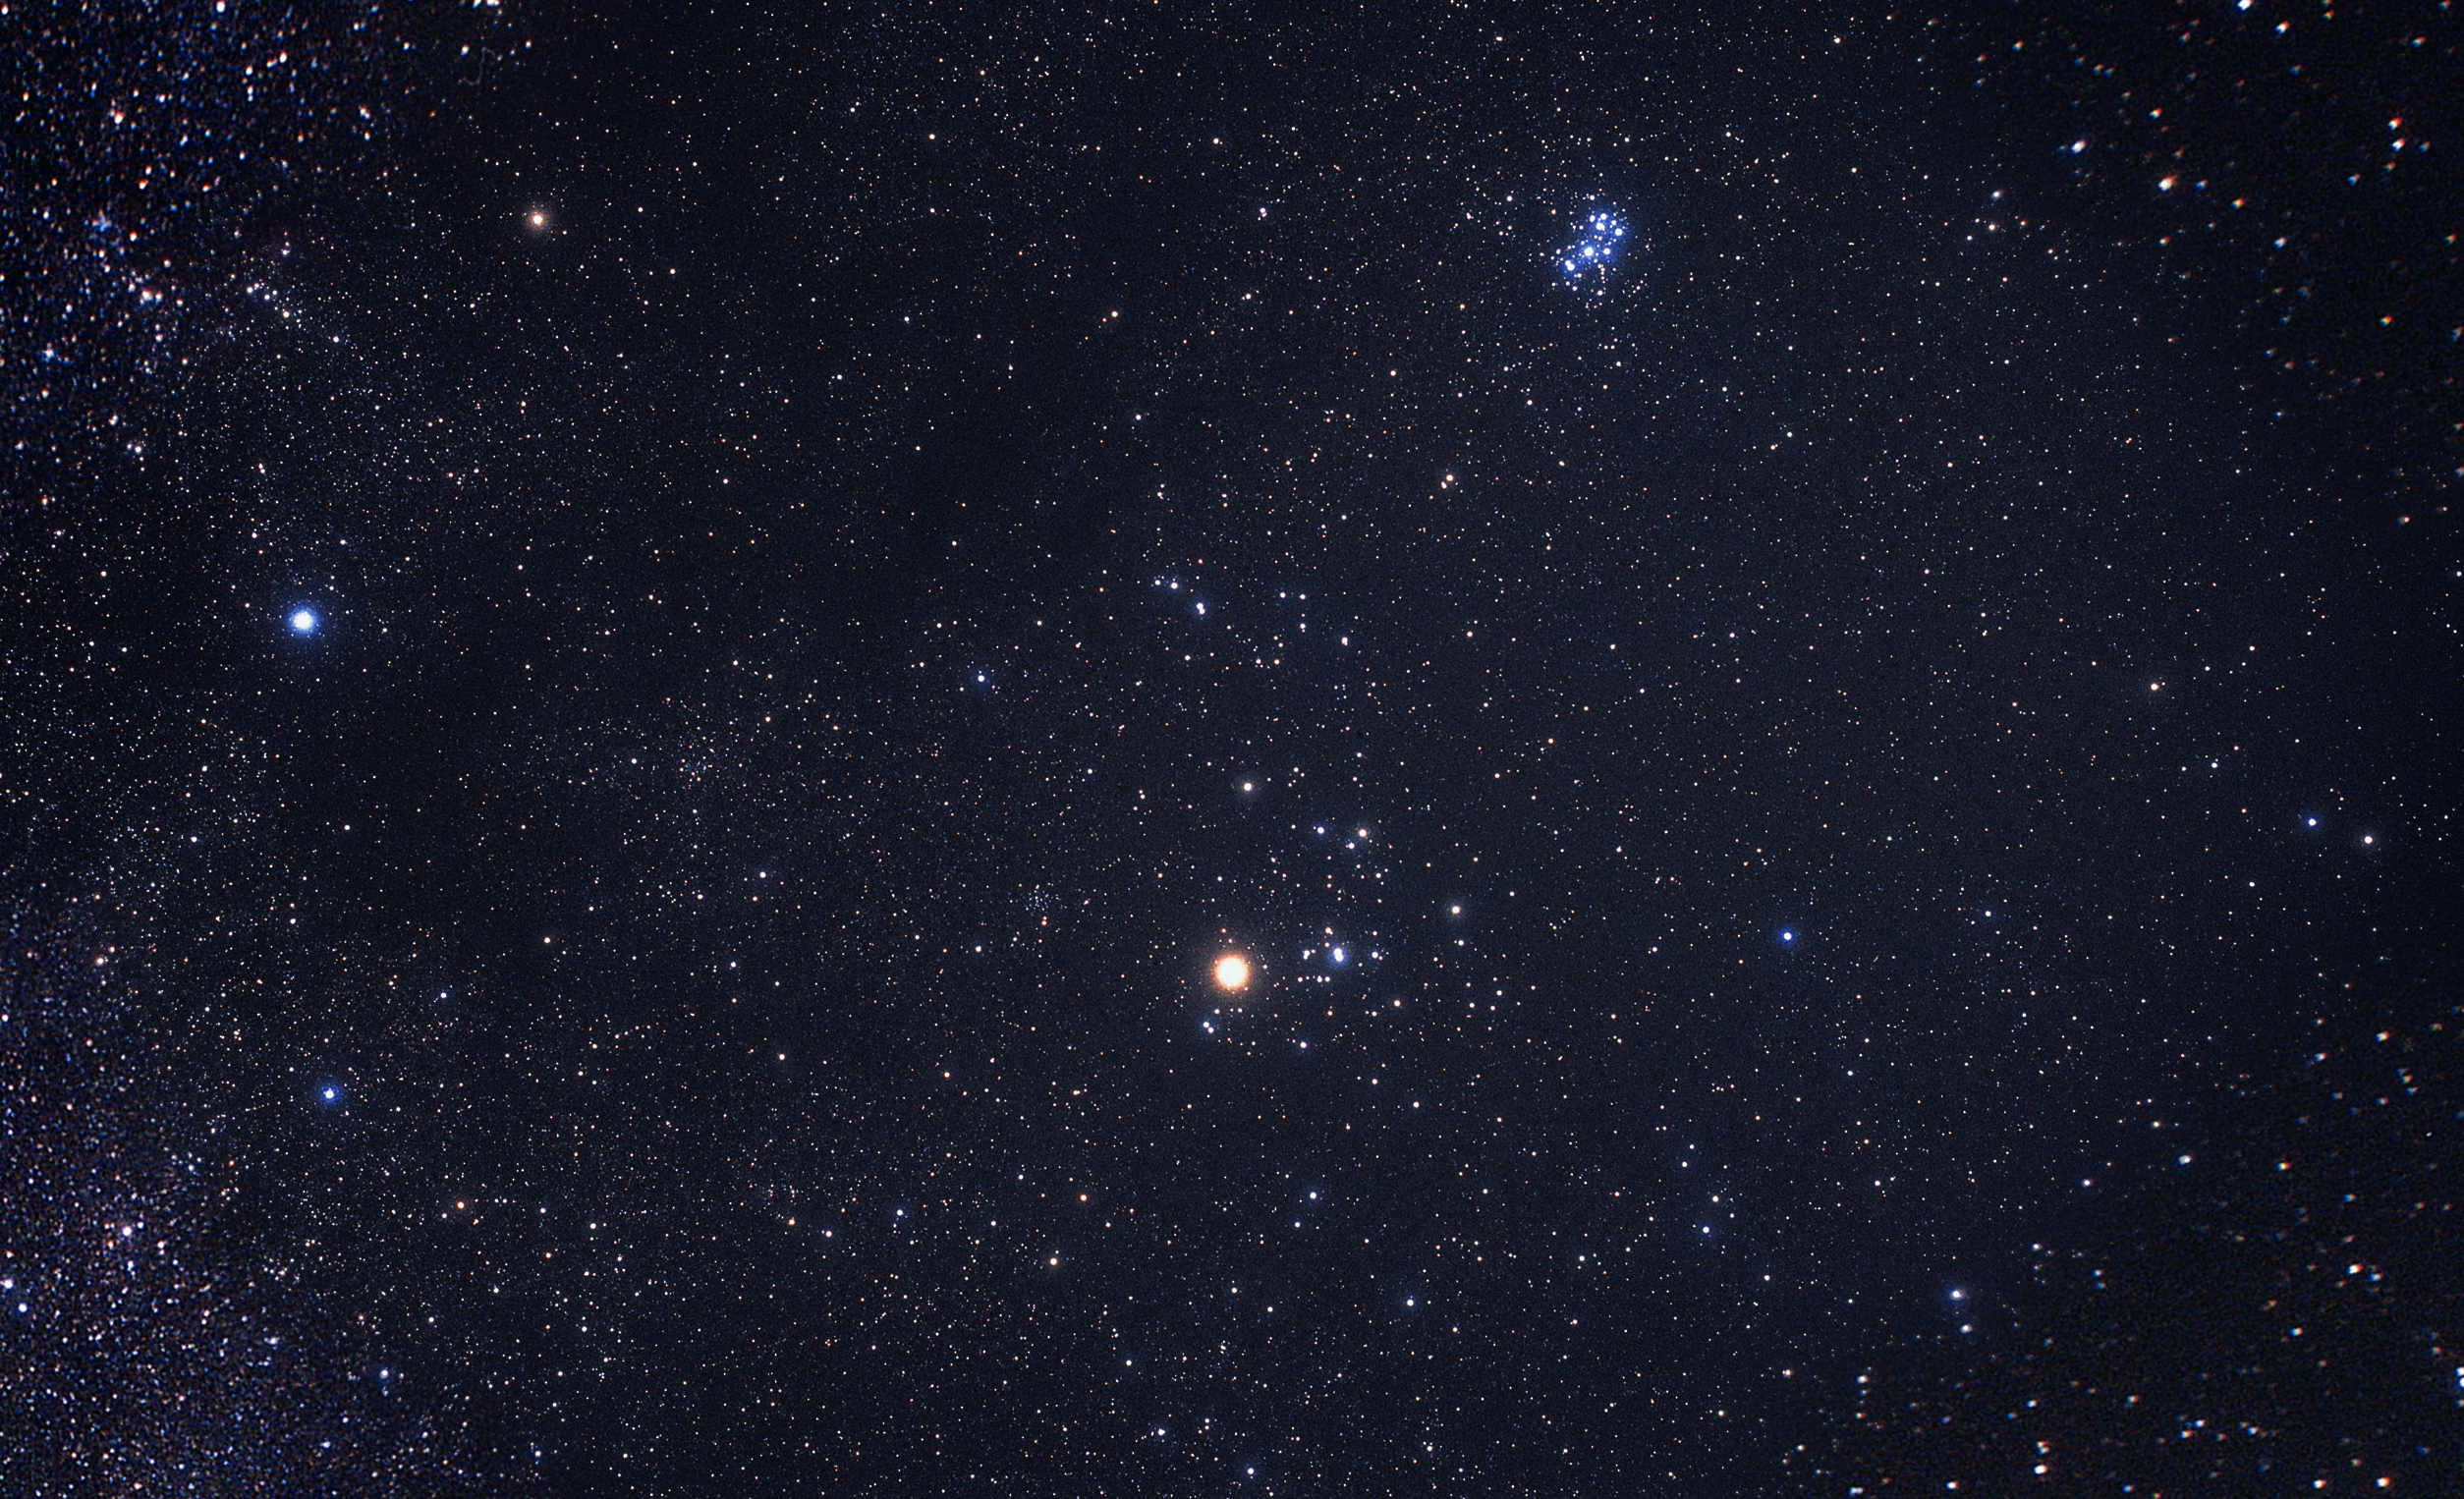

Constellation Taurus (ground-based image)

The constellation Taurus as photographed by the avid astrophotographer Akira Fujii.

Credit: Akira Fujii